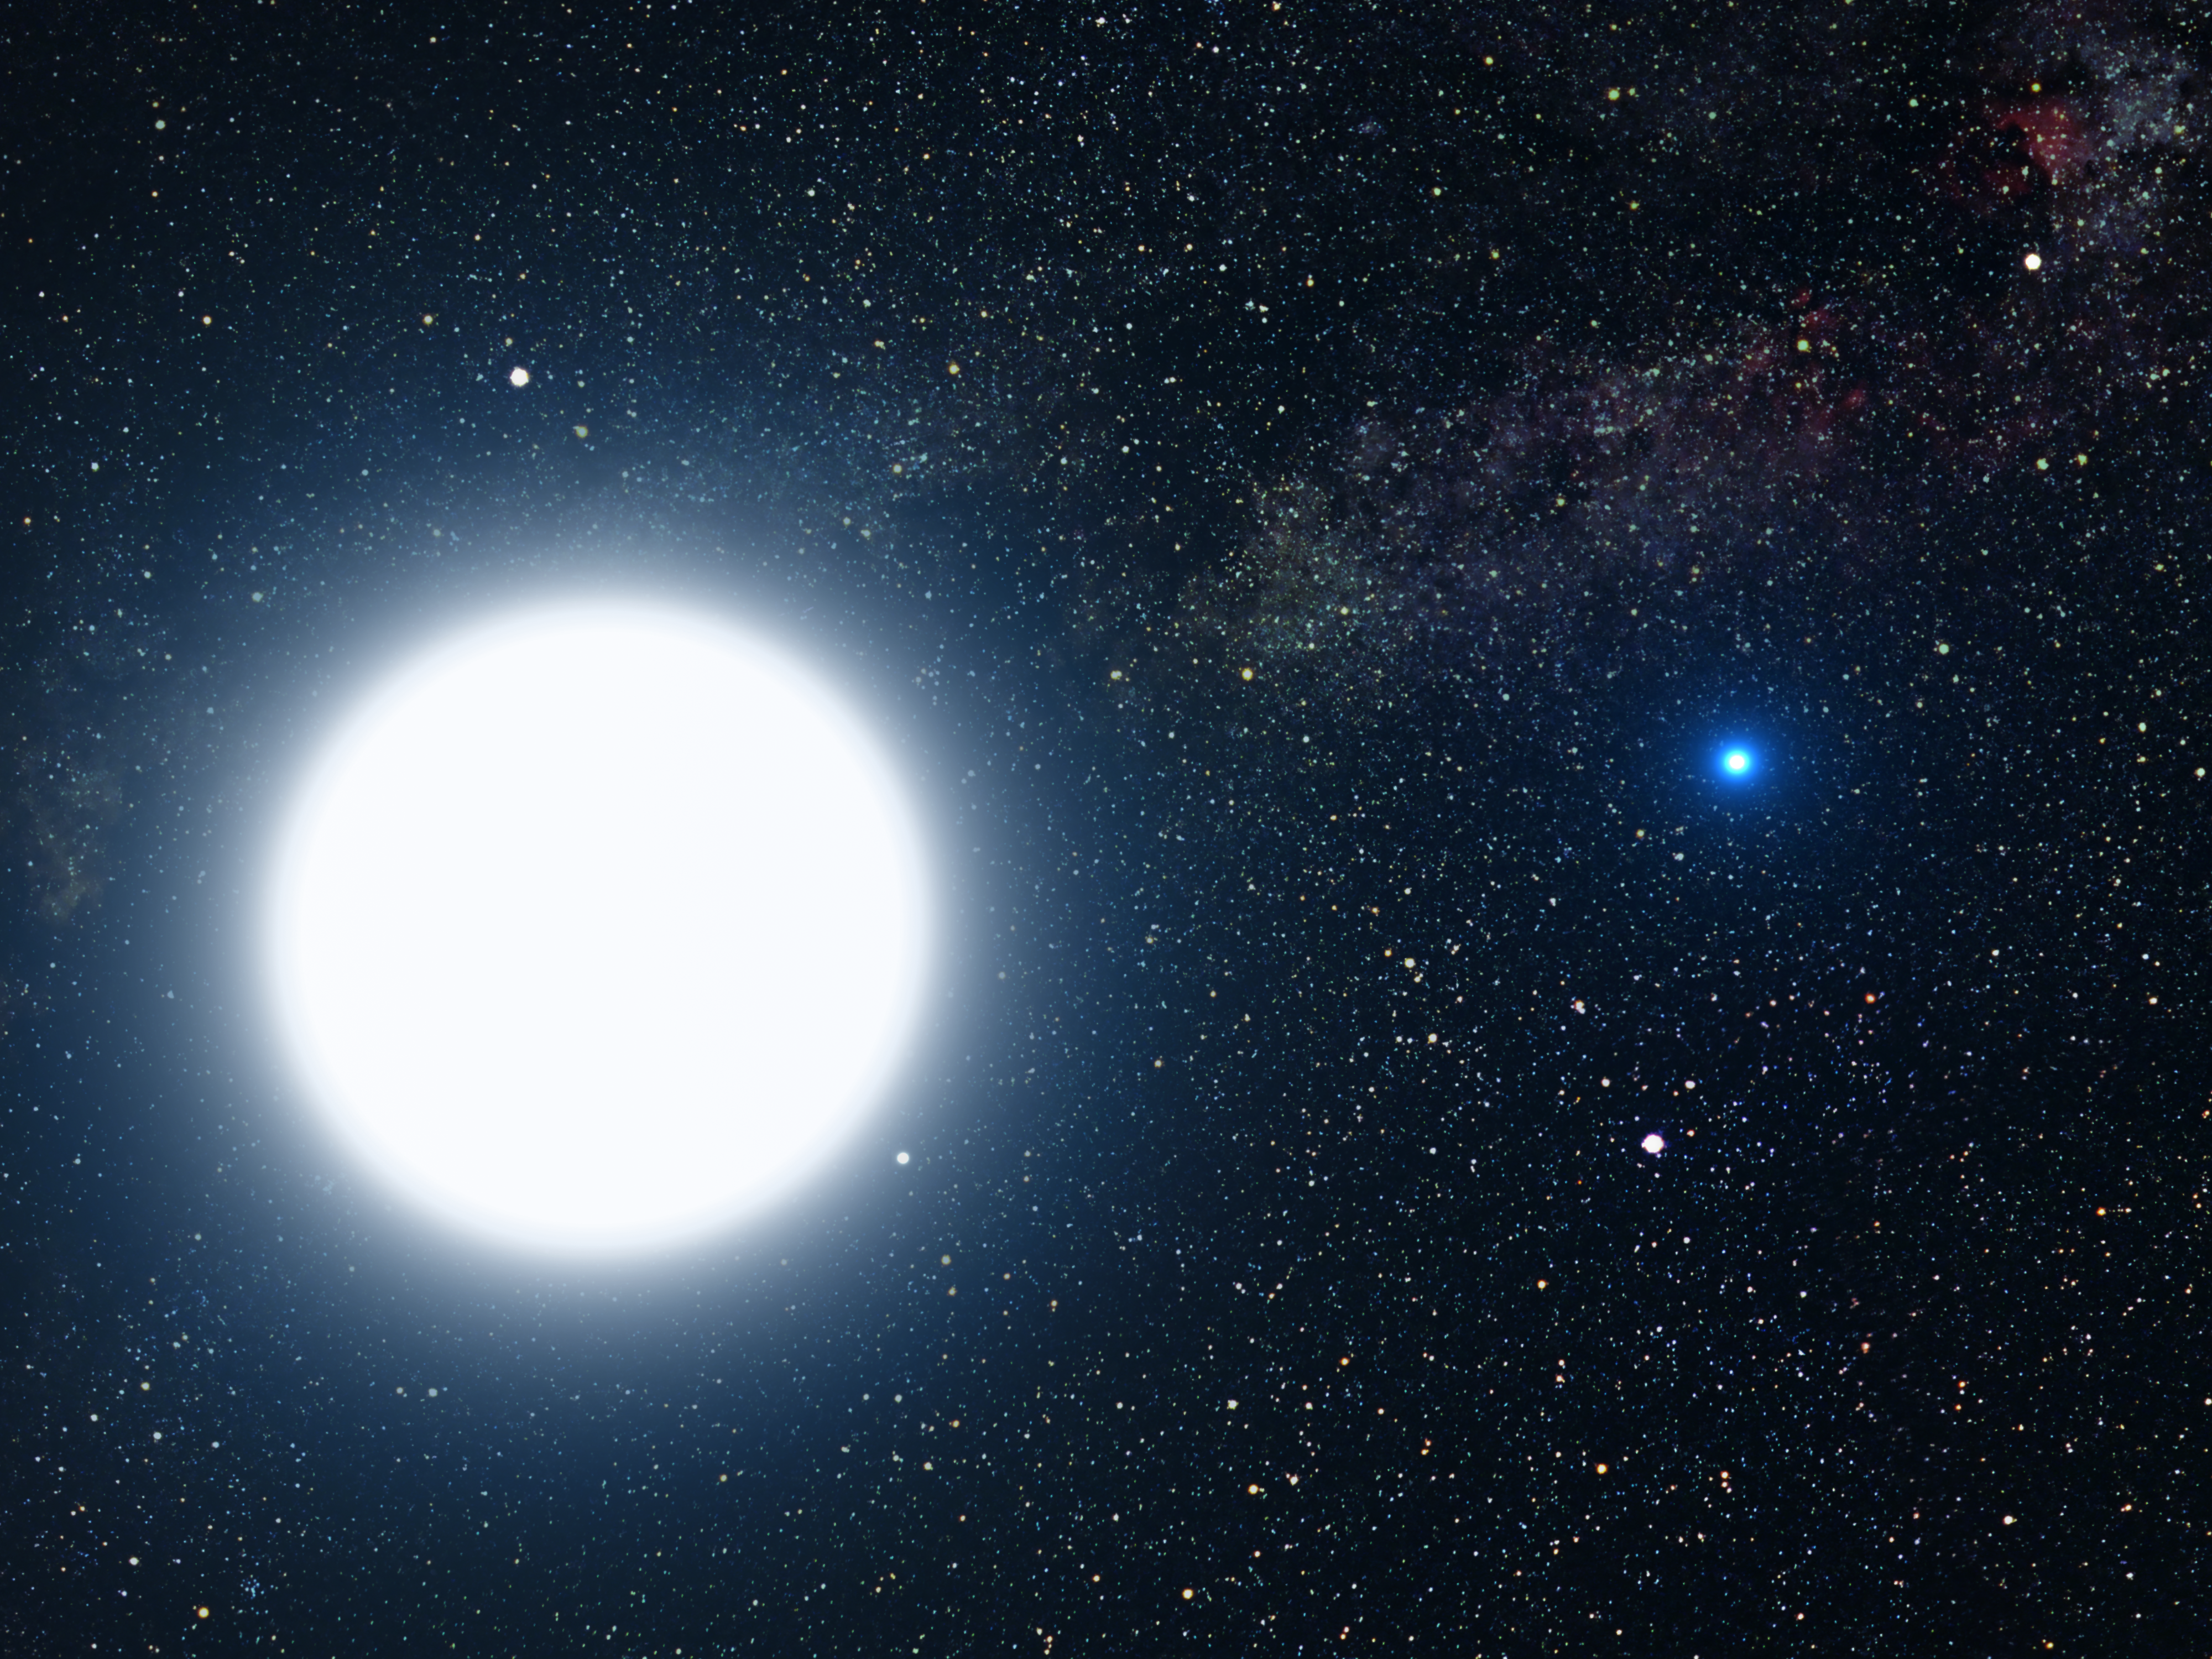

An artist's impression of Sirius A and B

This picture is an artist's impression showing how the binary star system of Sirius A and its diminutive blue companion, Sirius B, might appear to an interstellar visitor. The large, bluish-white star Sirius A dominates the scene, while Sirius B is the small but very hot and blue white-dwarf star on the right. The two stars revolve around each other every 50 years. White dwarfs are the leftover remnants of stars similar to our Sun. The Sirius system, only 8.6 light-years from Earth, is the fifth closest stellar system known. Sirius B is faint because of its tiny size. Its diameter is only 7,500 miles (about 12 thousand kilometres), slightly smaller than the size of our Earth. The Sirius system is so close to Earth that most of the familiar constellations would have nearly the same appearance as in our own sky. In this rendition, we see in the background the three bright stars that make up the Summer Triangle: Altair, Deneb, and Vega. Altair is the white dot above Sirius A; Deneb is the dot to the upper right; and Vega lies below Sirius B. But there is one unfamiliar addition to the constellations: our own Sun is the second-magnitude star, shown as a small dot just below and to the right of Sirius A.

Credit: NASA, ESA and G. Bacon (STScI)